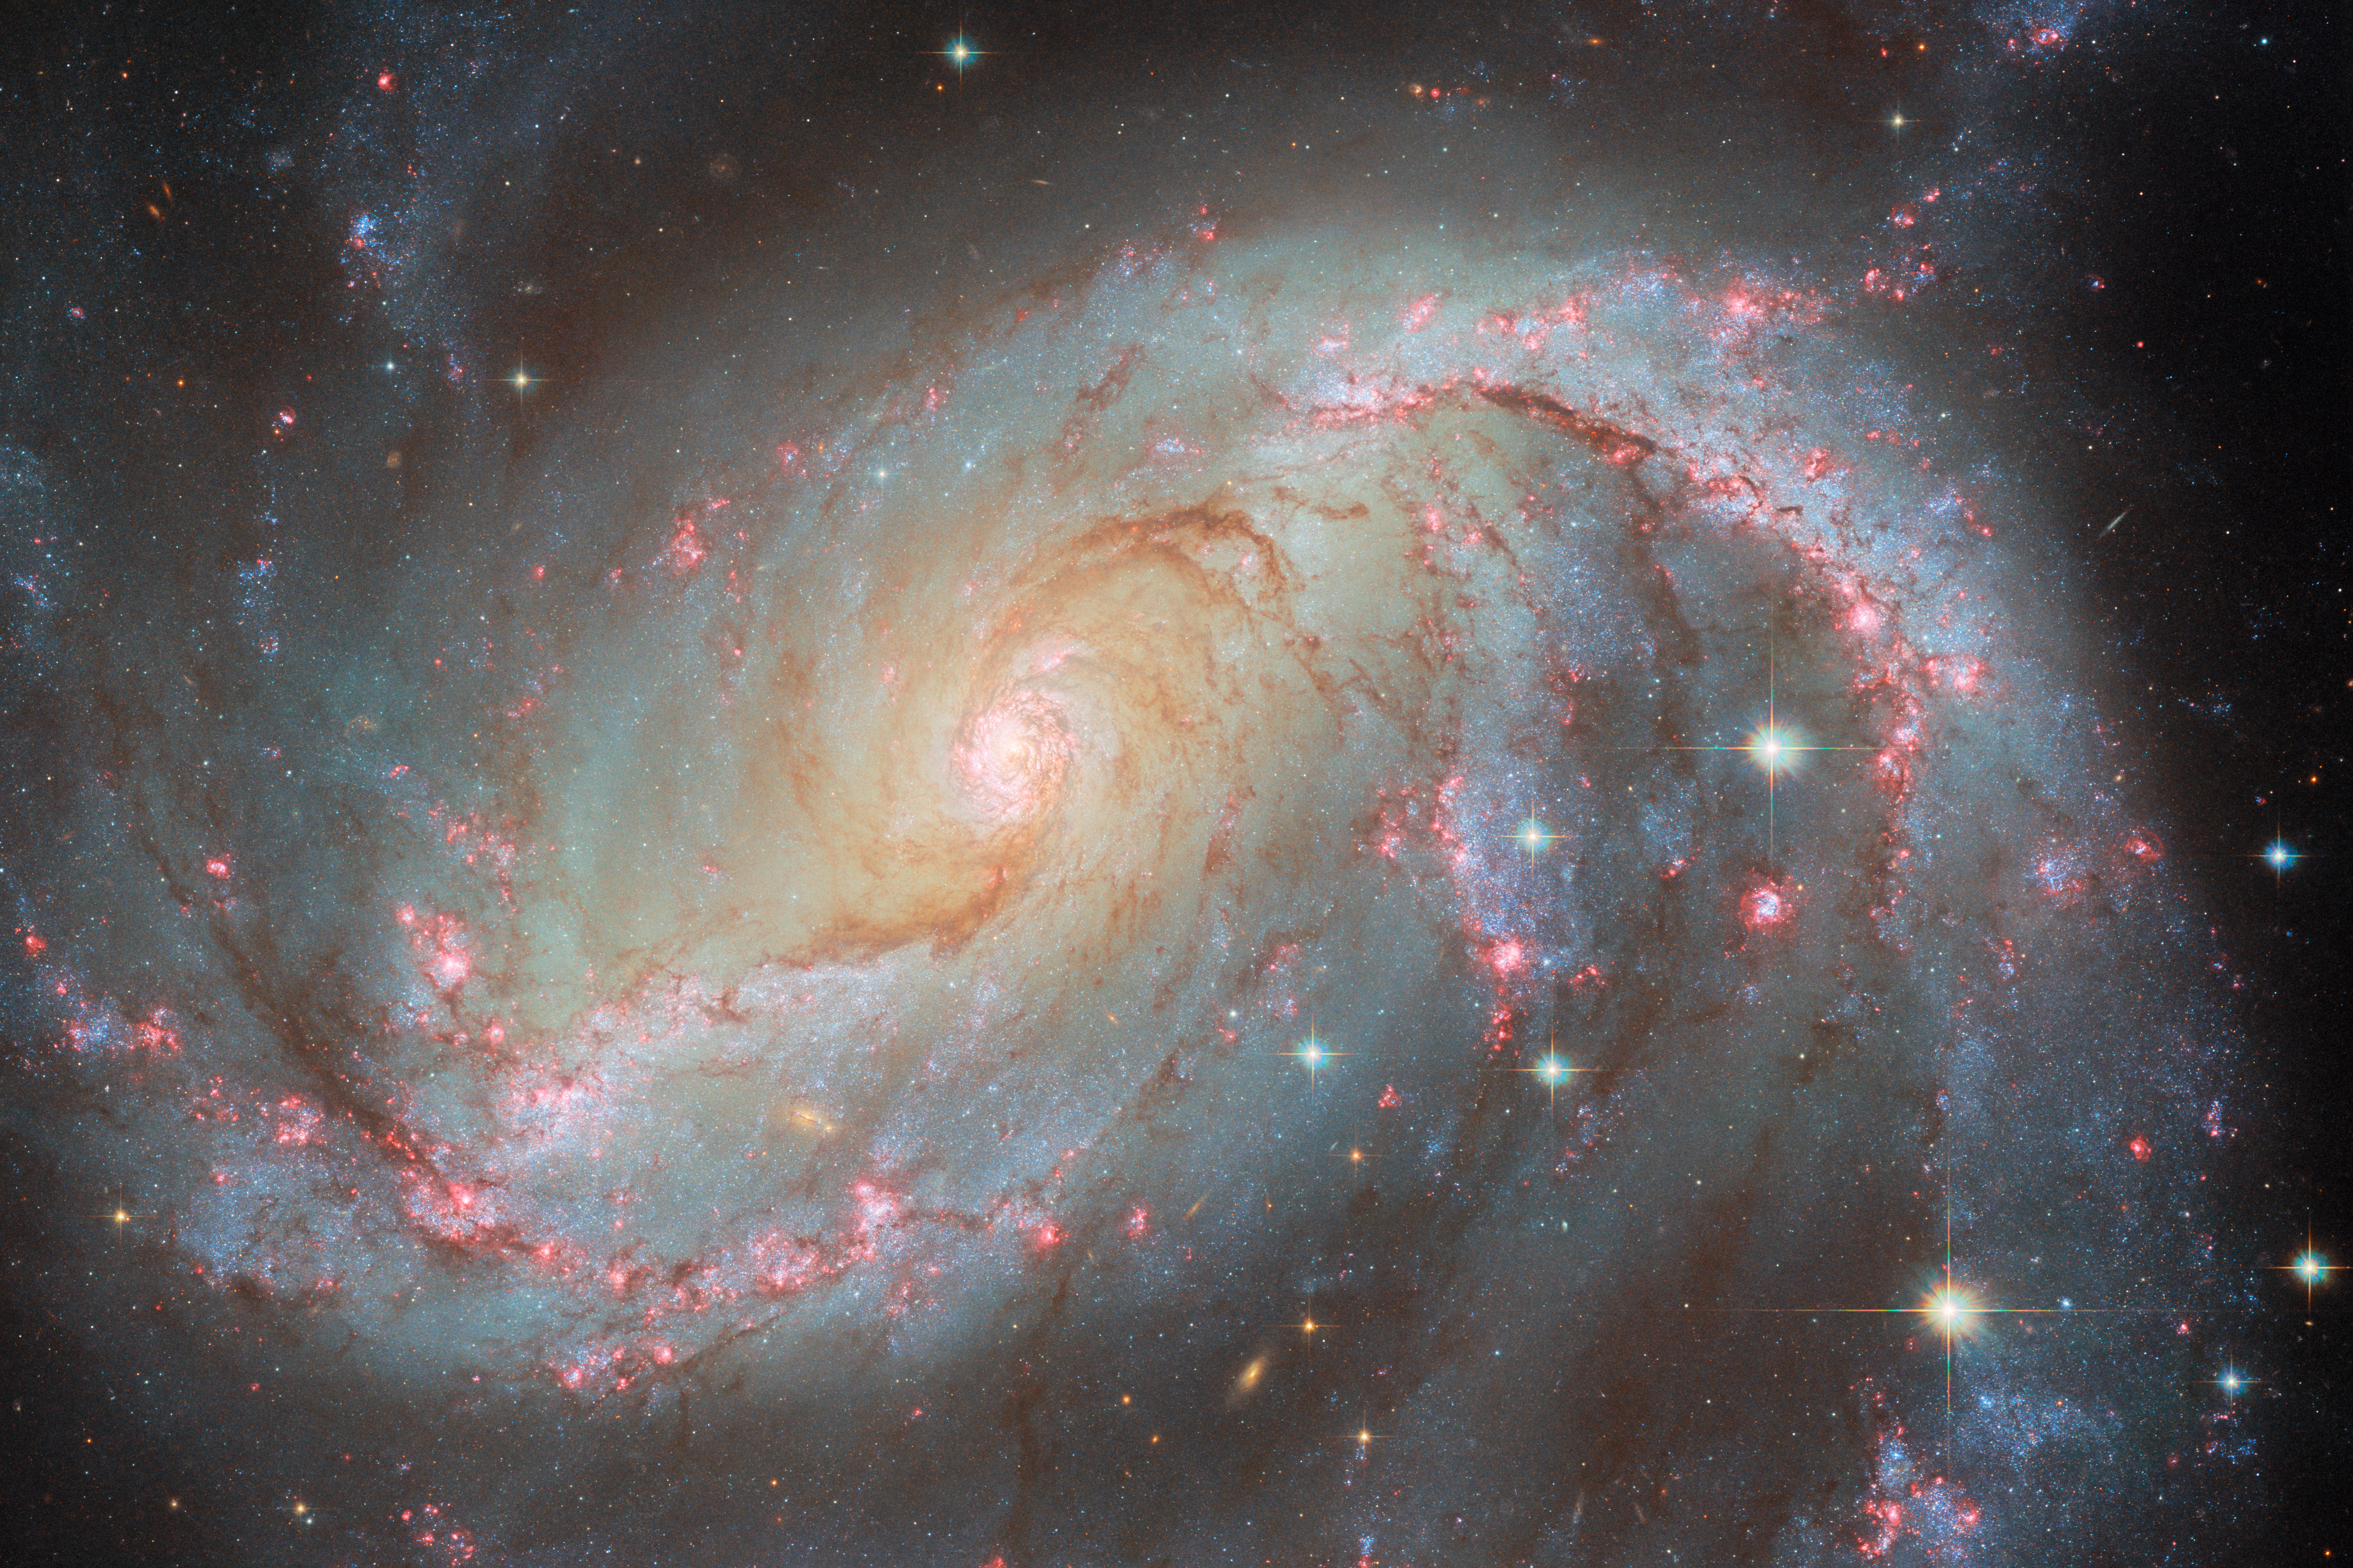

NGC 1672 (without SN)

This image depicts NGC 1672, a spiral galaxy in Dorado, and was created using six Hubble images taken over fifteen years. Here, the single Hubble image which showed the supernova SN 2017GAX has been omitted, replaced by a different Hubble image that was filtered to capture light of the same wavelength, but taken earlier. Compare with the main image, which does include that supernova snapshot.

You might also notice, if you look very closely between this and the main image, that the larger stars you can see in the bottom-left quadrant seem to shift position a little, even though the galaxy and smaller stars don’t move. That’s because these are both composite images made up of several separate images from Hubble, taken over a span of time. Between the particular frame included in this image which does not show the supernova, and the frame included in the main image which does, there is a gap of twelve years! The stars you see moving lie between Earth and NGC 1672, most likely in the Milky Way galaxy, which is close enough that over twelve years’ time we can begin to notice their motion relative to us.

Also try comparing the two images directly with our slider tool here.

Credit: ESA/Hubble & NASA, O. Fox, L. Jenkins, A. Filippenko, J. Lee and the PHANGS-HST Team, D. de Martin (ESA/Hubble), M. Zamani (ESA/Hubble)